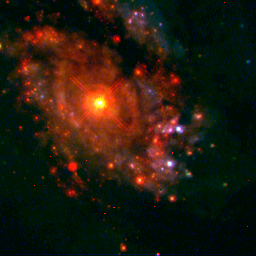

Starry bulges yield secrets to galaxy growth (Hubble NICMOS View)

In this infrared image, the Hubble telescope penetrates the dust seen in the WFPC2 picture to reveal more clusters of young stars. The bright blue dots represent young star clusters; the brightest of the red dots are young star clusters enshrouded in dust and visible only in the infrared image. The fainter red dots are older star clusters.

Credit: NASA, ESA, and C. Marcella Carollo (Columbia University)